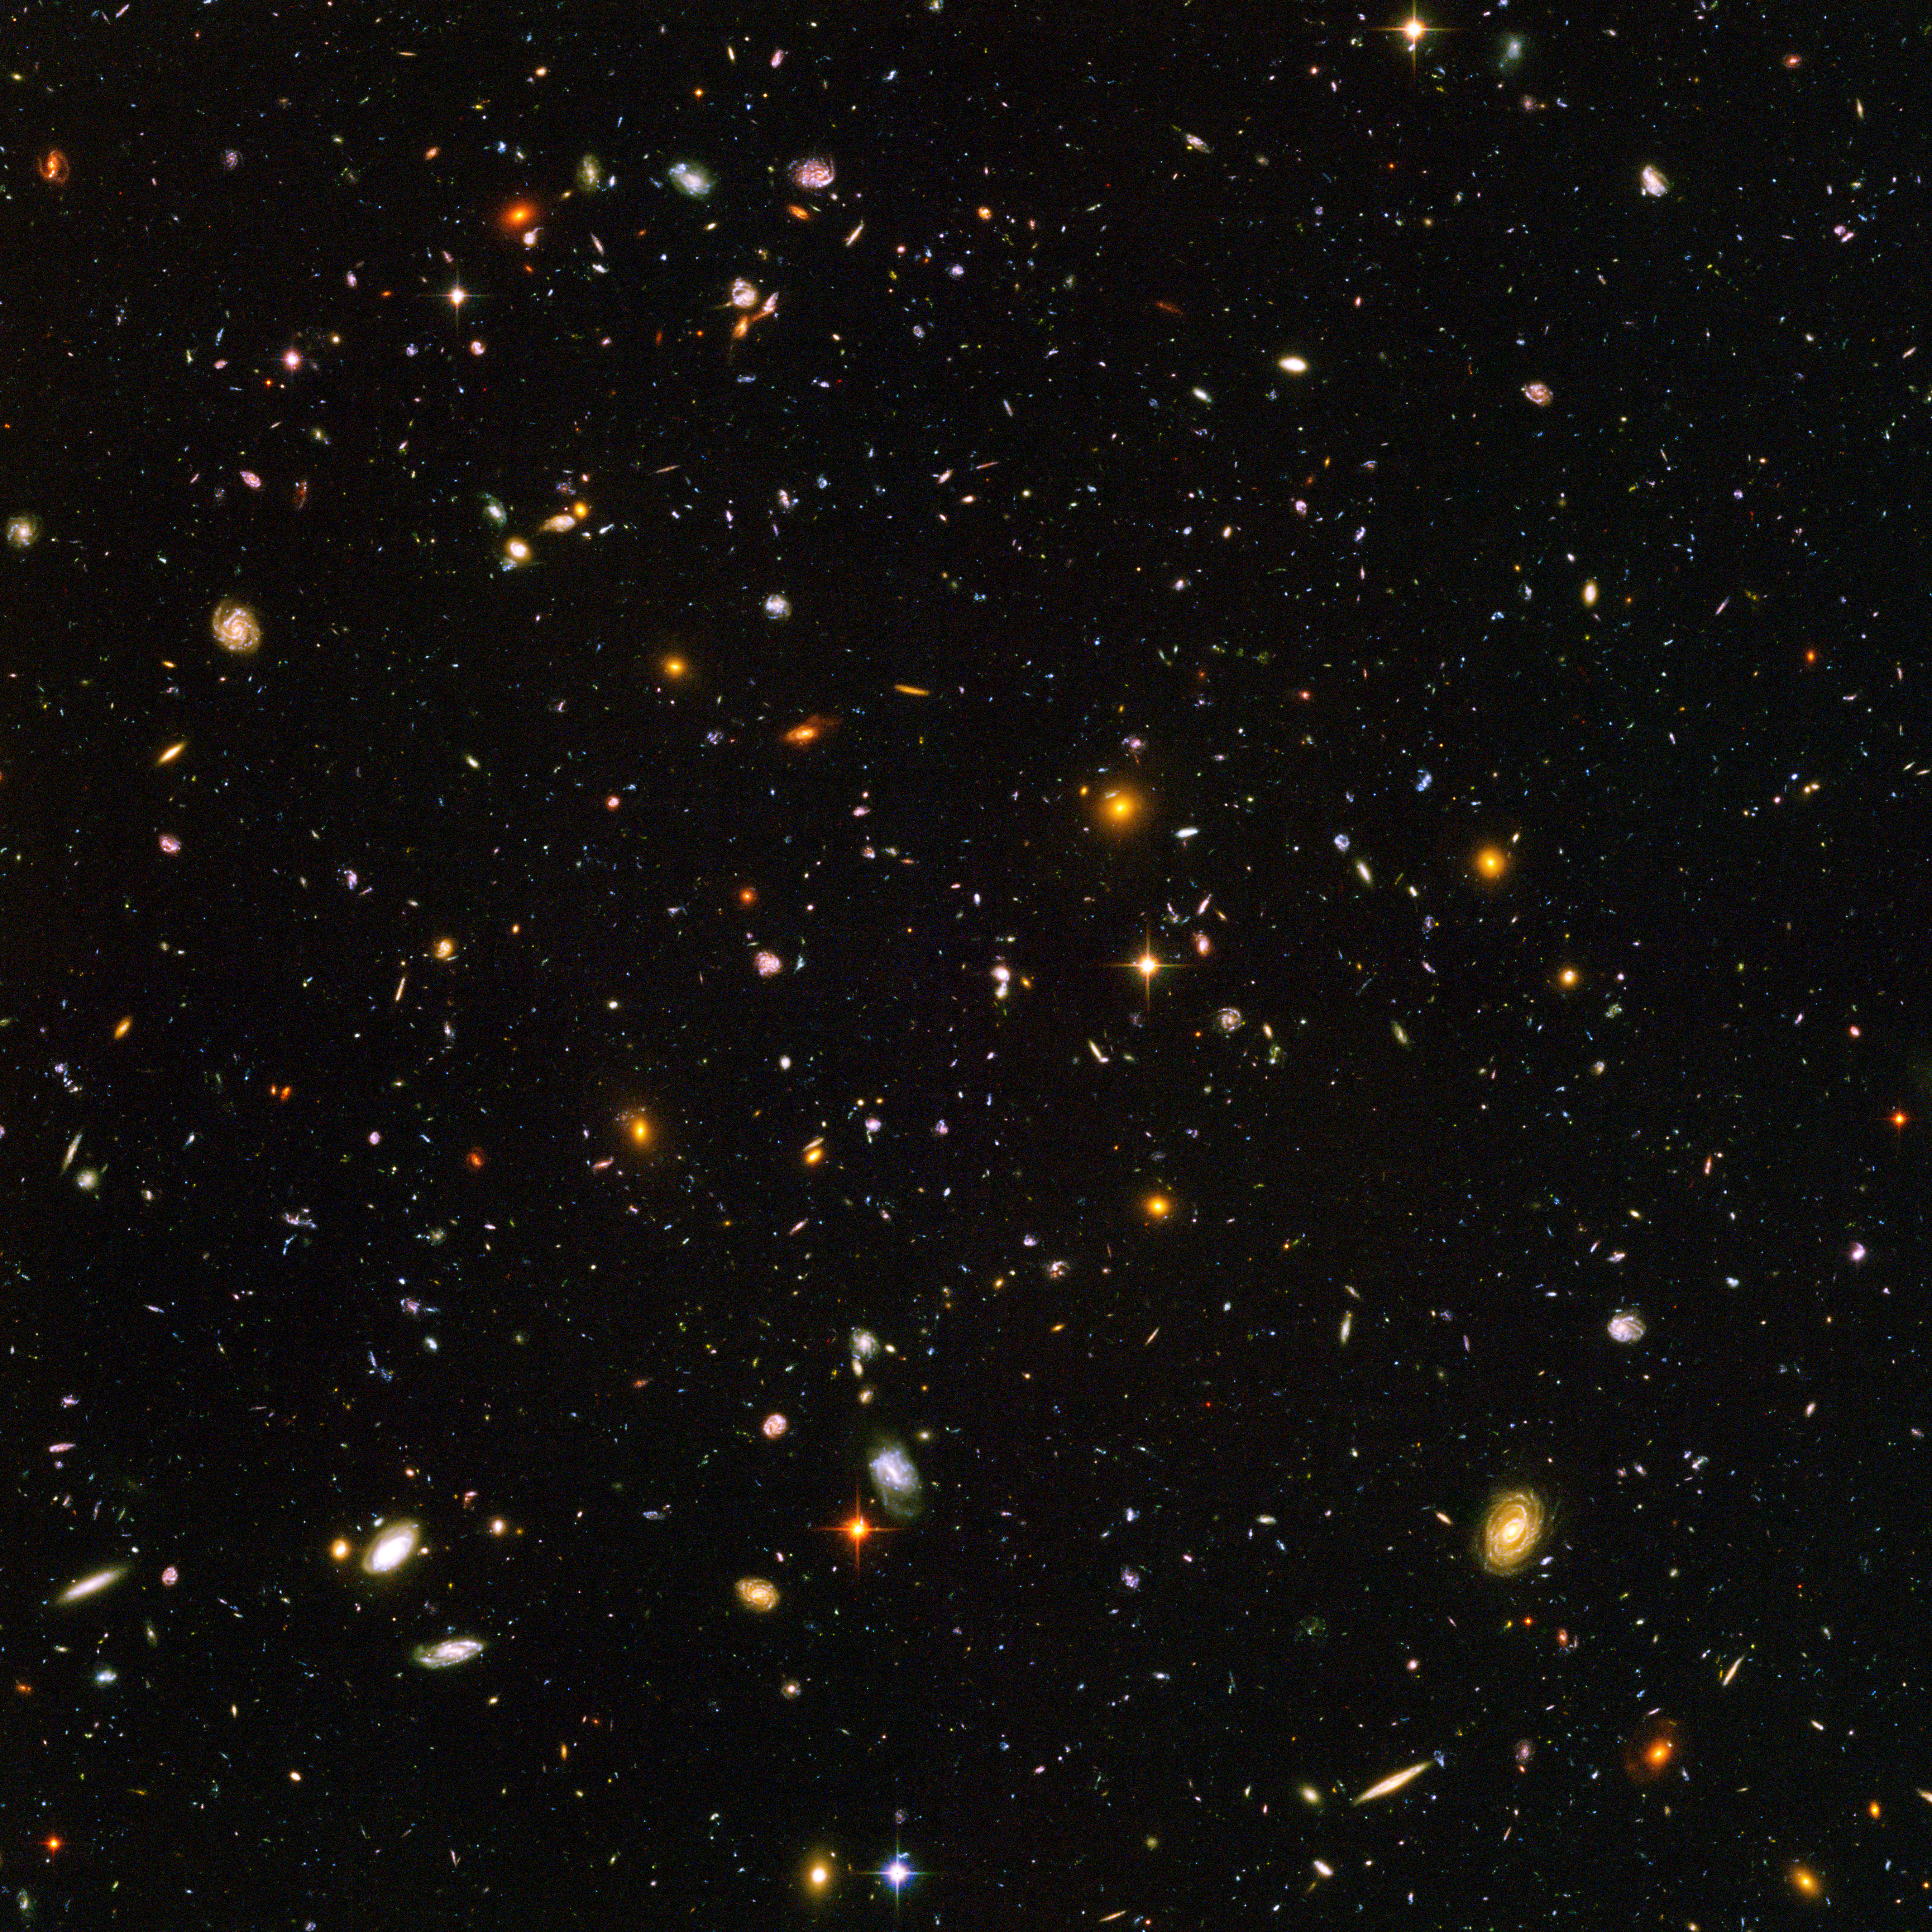

Hubble sees galaxies galore

Galaxies, galaxies everywhere - as far as the NASA/ESA Hubble Space Telescope can see. This view of nearly 10,000 galaxies is the deepest visible-light image of the cosmos. Called the Hubble Ultra Deep Field, this galaxy-studded view represents a "deep" core sample of the universe, cutting across billions of light-years.

The snapshot includes galaxies of various ages, sizes, shapes, and colours. The smallest, reddest galaxies, about 100, may be among the most distant known, existing when the universe was just 800 million years old. The nearest galaxies - the larger, brighter, well-defined spirals and ellipticals - thrived about 1 billion years ago, when the cosmos was 13 billion years old.

In vibrant contrast to the rich harvest of classic spiral and elliptical galaxies, there is a zoo of oddball galaxies littering the field. Some look like toothpicks; others like links on a bracelet. A few appear to be interacting. These oddball galaxies chronicle a period when the universe was younger and more chaotic. Order and structure were just beginning to emerge.

The Ultra Deep Field observations, taken by the Advanced Camera for Surveys, represent a narrow, deep view of the cosmos. Peering into the Ultra Deep Field is like looking through a 2.5 metre-long soda straw.

In ground-based photographs, the patch of sky in which the galaxies reside (just one-tenth the diameter of the full Moon) is largely empty. Located in the constellation Fornax, the region is so empty that only a handful of stars within the Milky Way galaxy can be seen in the image.

In this image, blue and green correspond to colours that can be seen by the human eye, such as hot, young, blue stars and the glow of Sun-like stars in the disks of galaxies. Red represents near-infrared light, which is invisible to the human eye, such as the red glow of dust-enshrouded galaxies.

The image required 800 exposures taken over the course of 400 Hubble orbits around Earth. The total amount of exposure time was 11.3 days, taken between Sept. 24, 2003 and Jan. 16, 2004.

Credit: NASA, ESA, and S. Beckwith (STScI) and the HUDF Team